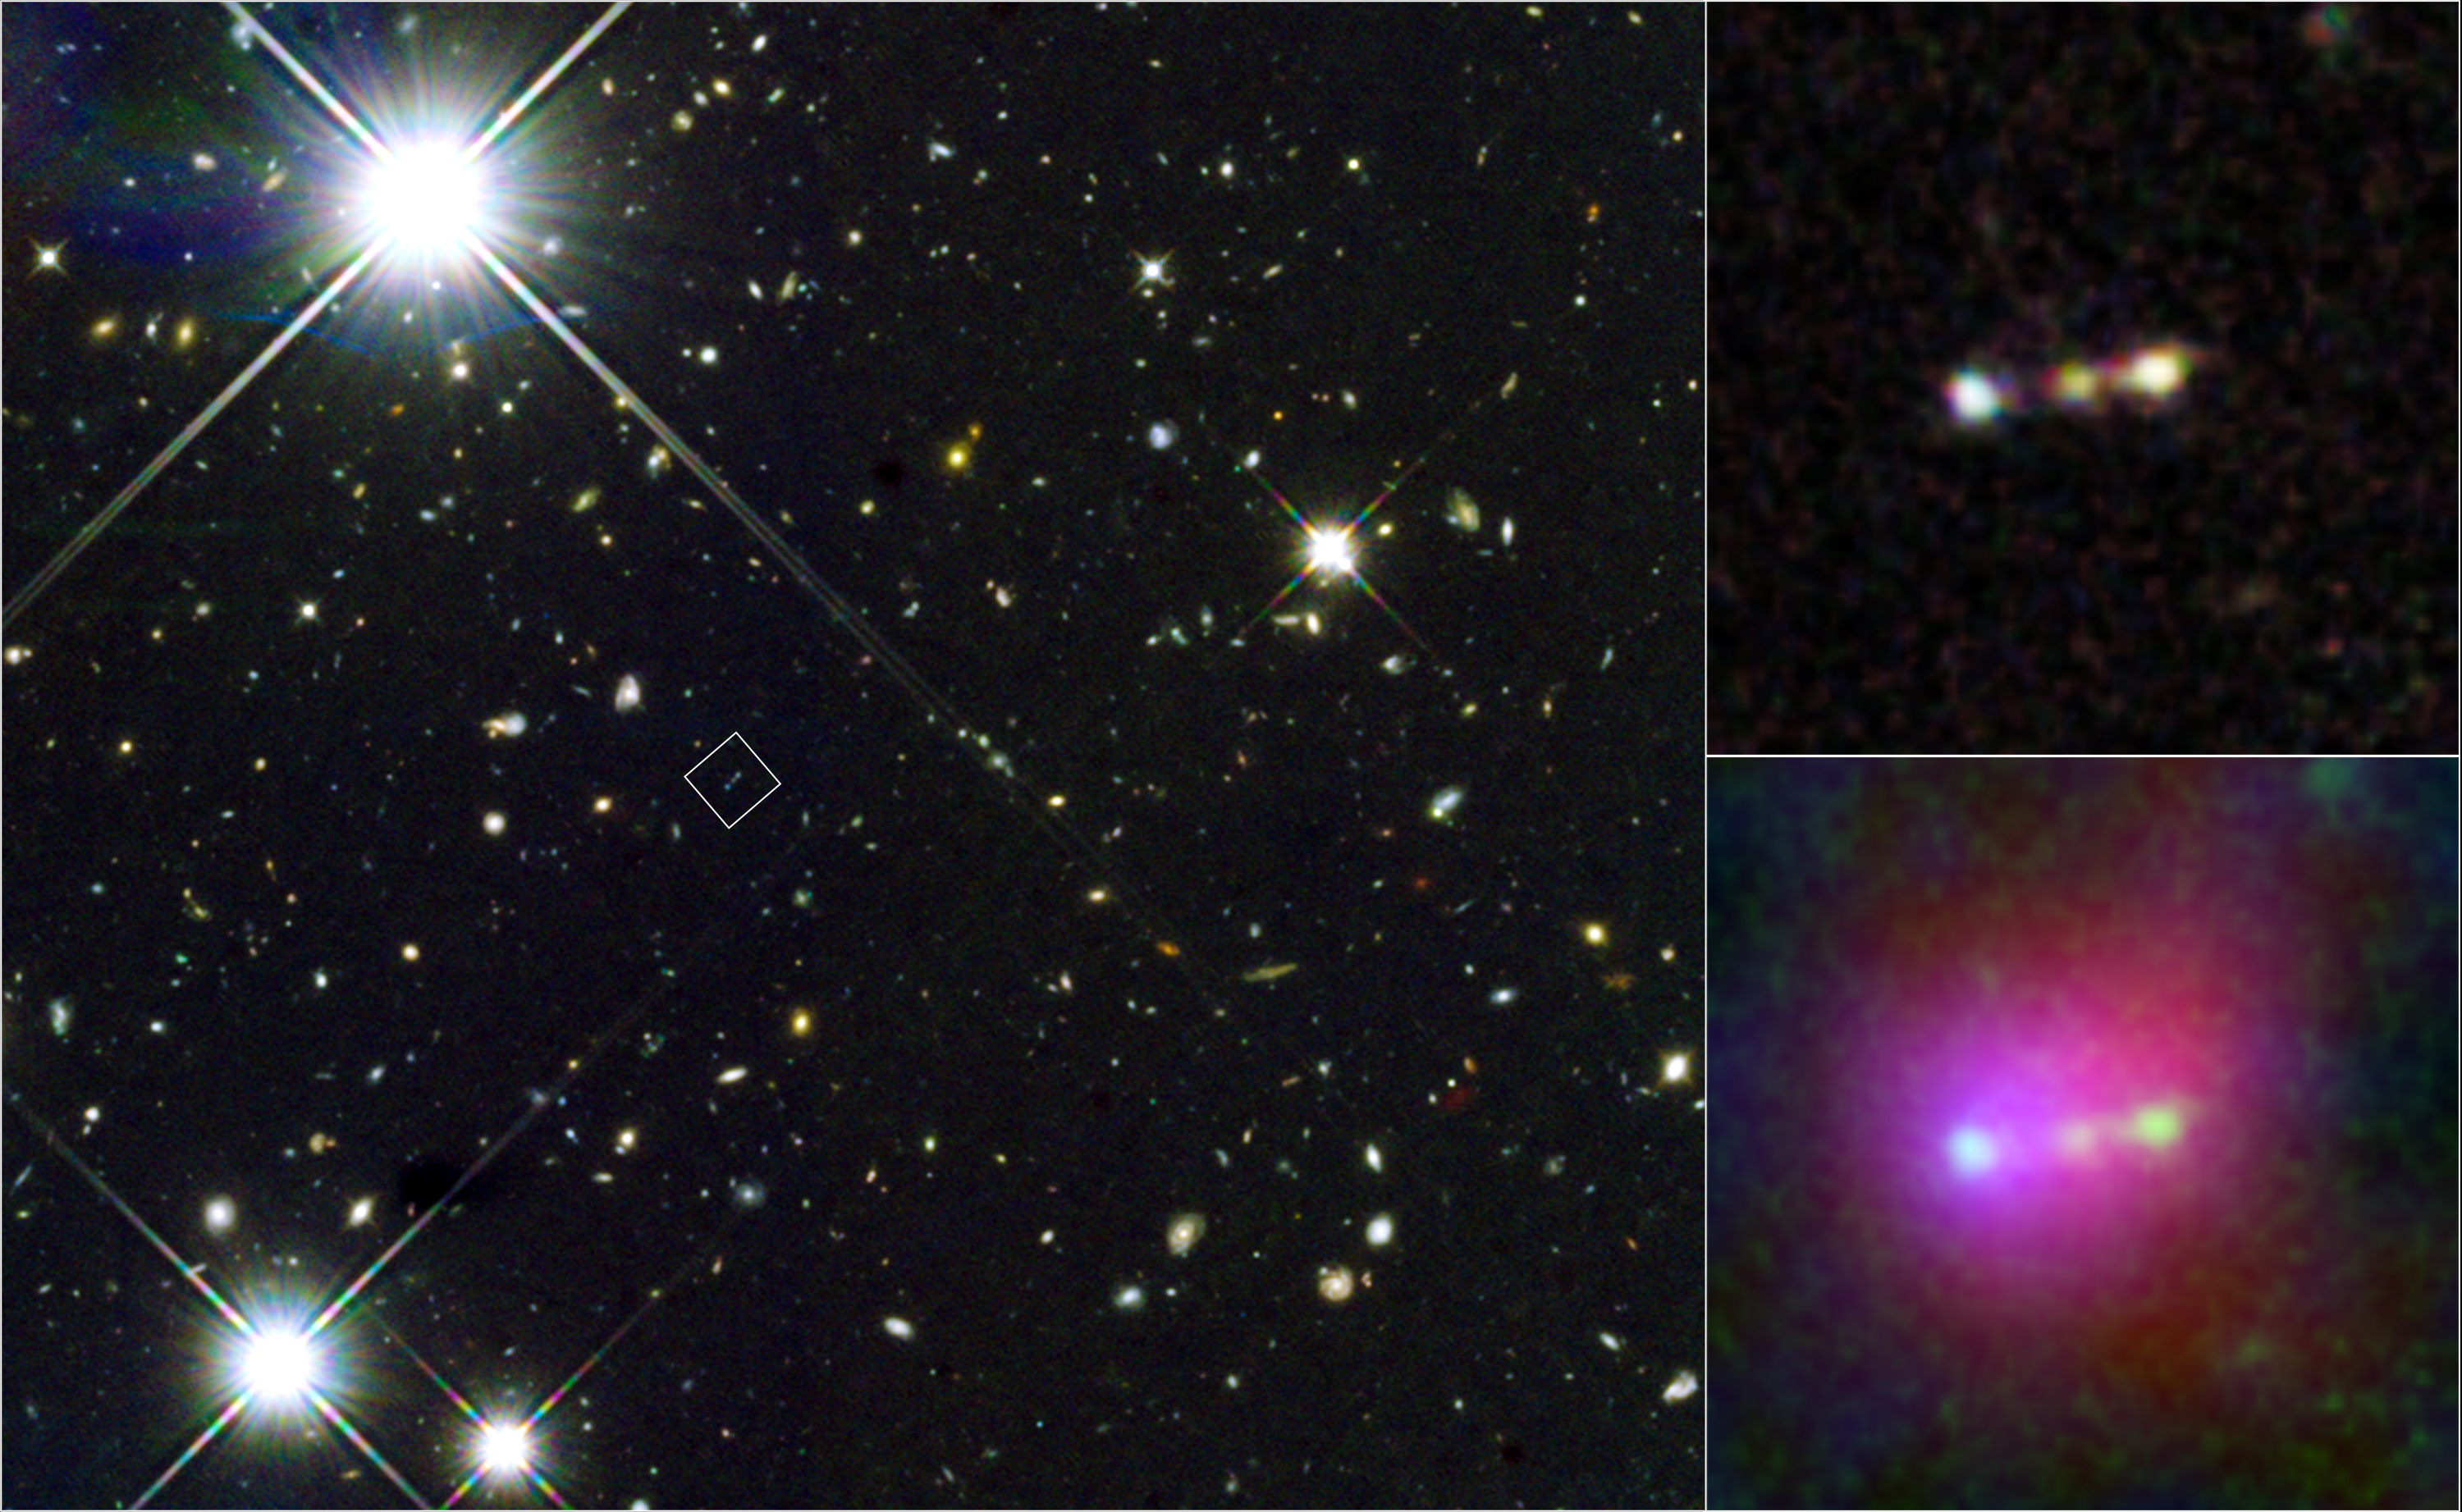

View of a primordial gas bubble dubbed Himiko

This image of a giant primordial bubble of gas, dubbed "Himiko" (after the queen of ancient Japan), is assembled from Hubble, Subaru, and Spitzer data. The left panel shows the field around Himiko, as viewed by Hubble. The position of Himiko is marked with a square.

The right panels show close-up views of the Hubble image (top) and a combination of Hubble, Subaru, and Spitzer images (bottom). In the Hubble image, infrared wavelengths captured by Hubble's Wide Field Camera 3 at 0.98, 1.25, and 1.6 microns are represented by blue, green, and red, respectively. In the Hubble/Subaru/Spitzer image, the combination of three Hubble infrared bands is green, while Lyman-alpha emission captured by Subaru Suprime-Cam and infrared 3.6 micron taken by the Spitzer Infrared Array Camera are presented with blue and red, respectively.

Credit: NASA, ESA, ESO, NRAO, NAOJ, JAO, M. Ouchi (University of Tokyo), R. Ellis (California Institute of Technology), Y. Ono (University of Tokyo), K. Nakanishi (The Graduate University for Advanced Studies (SOKENDAI) and Joint ALMA Observatory), K. Kohno and R. Momose (University of Tokyo), Y. Kurono (Joint ALMA Observatory), M. Ashby (Harvard-Smithsonian Center for Astrophysics), K. Shimasaku (University of Tokyo), S. Willner and G. Fazio (Harvard-Smithsonian Center for Astrophysics), Y. Tamura (University of Tokyo), and D. Iono (National Astronomical Observatory of Japan)